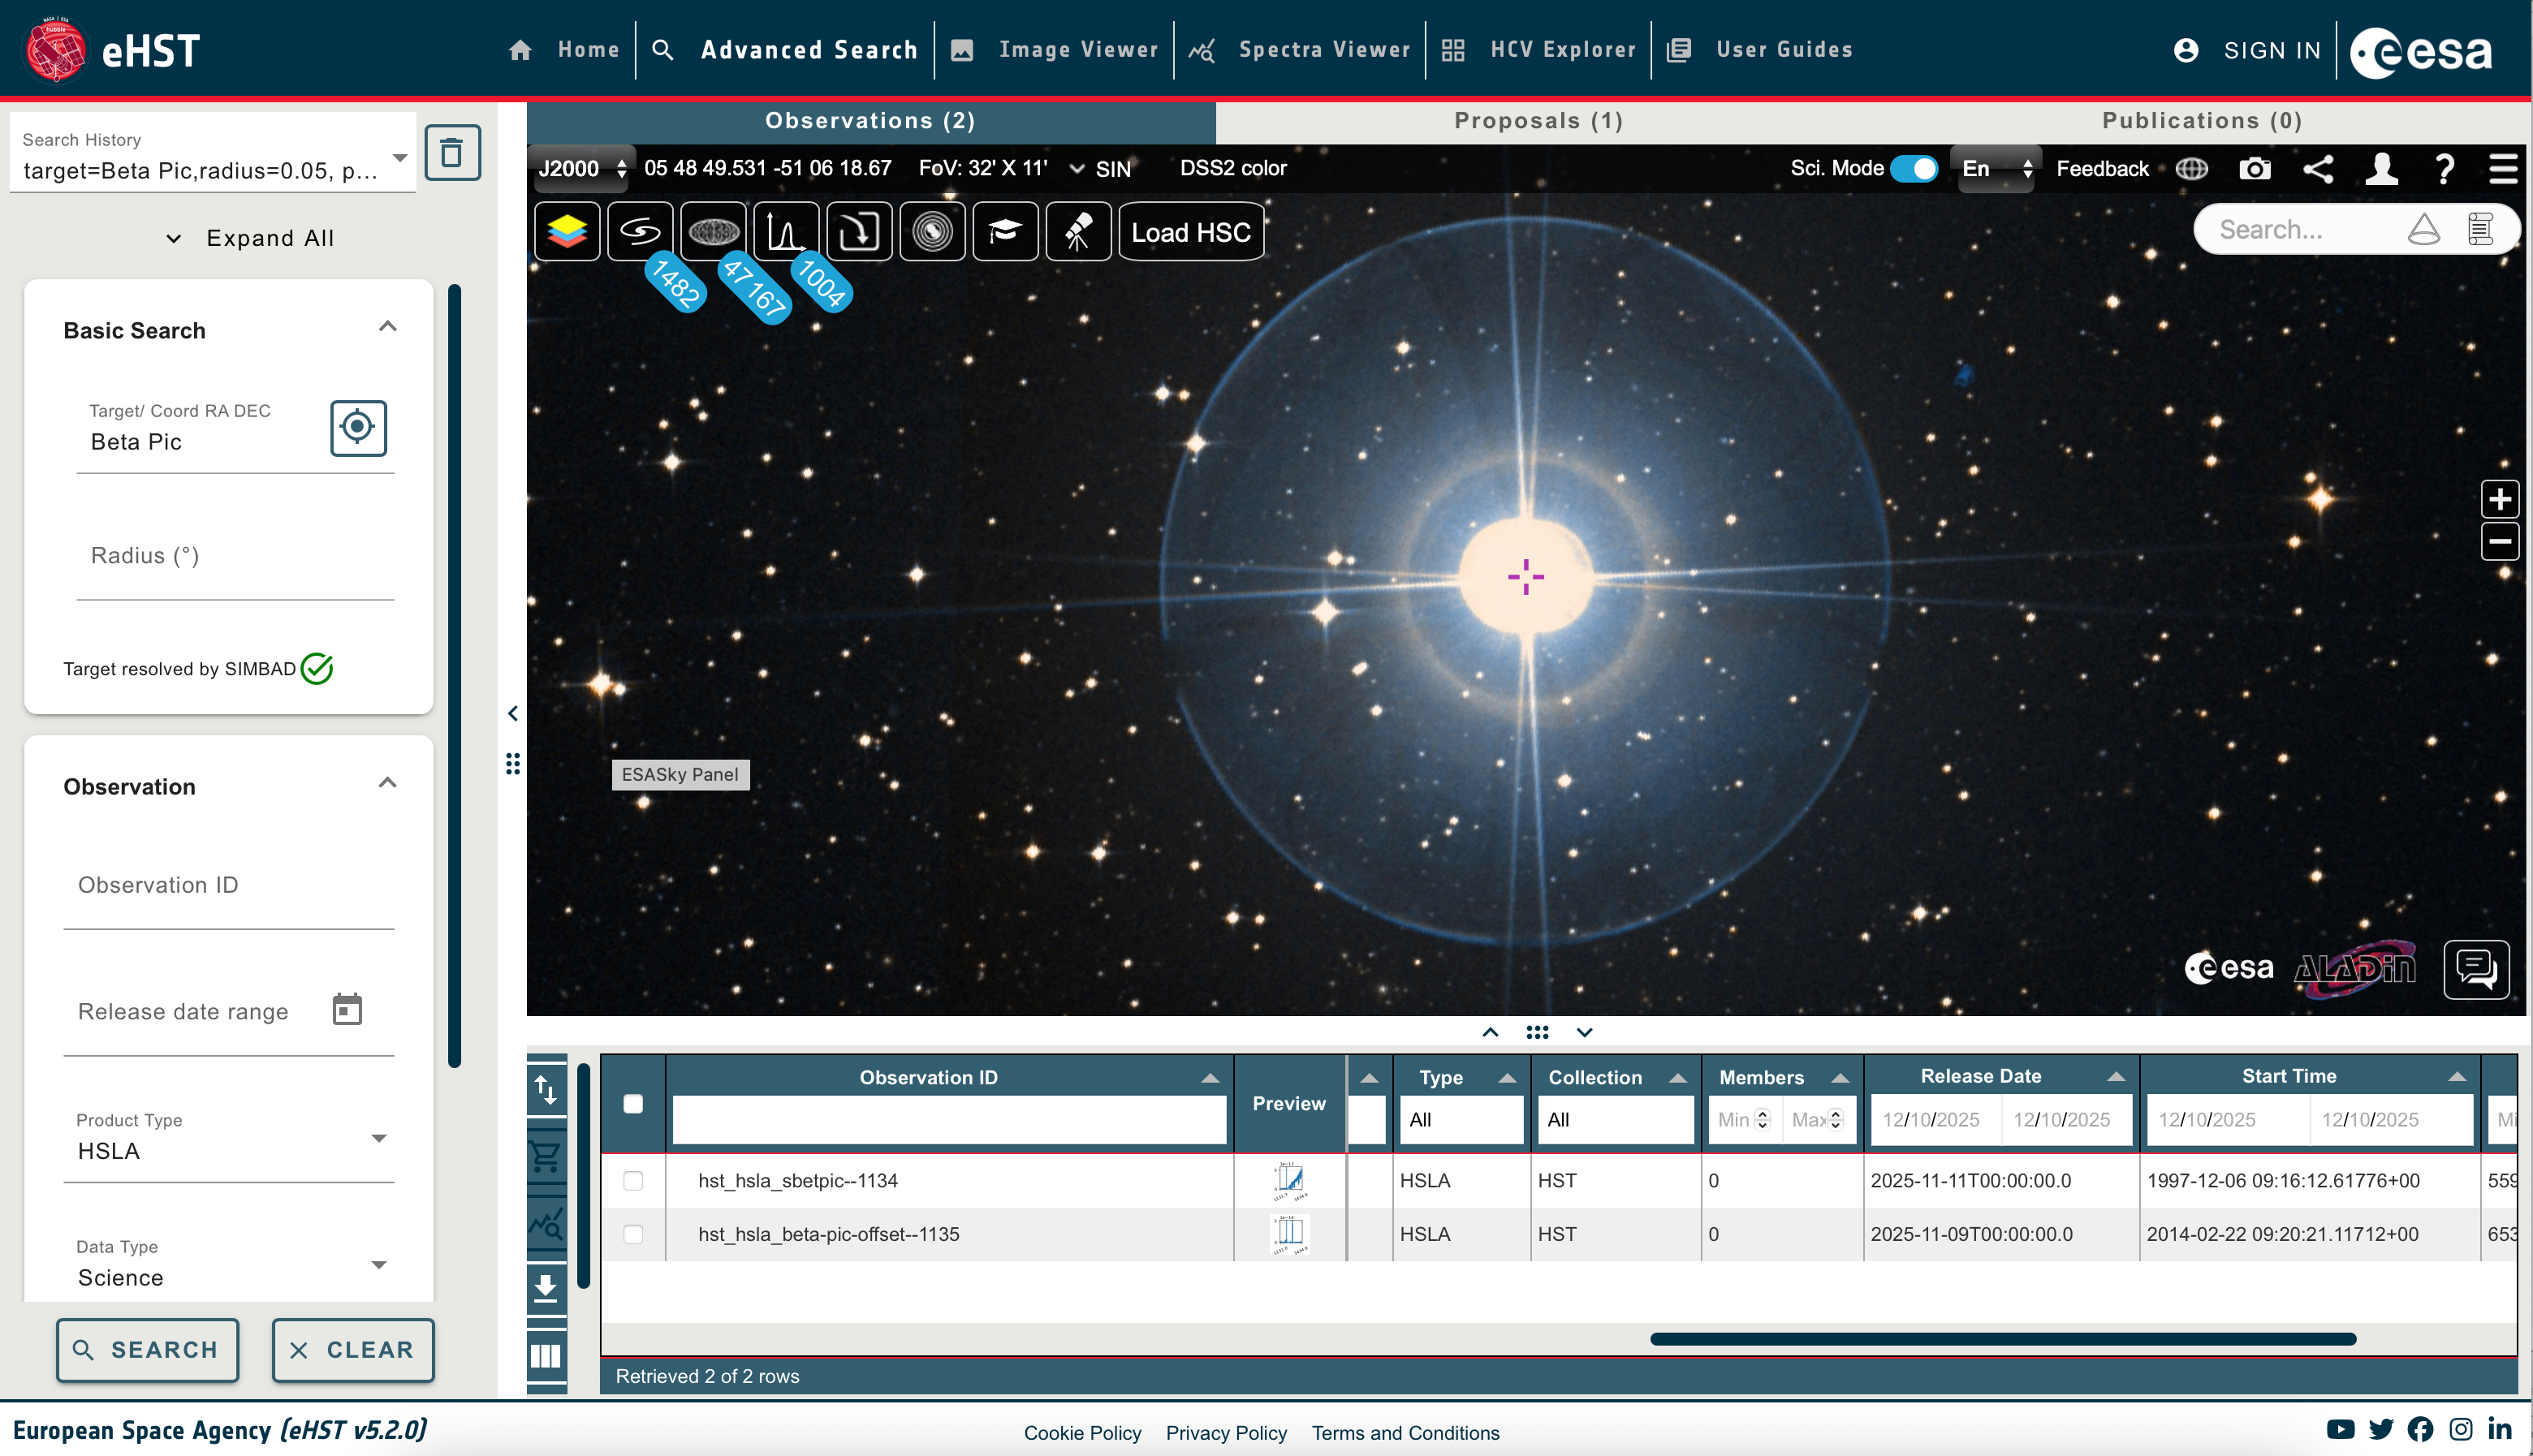

Example HSLA products available in eHST

This image shows an example of of HSLA products in eHST.

Credit: eHST